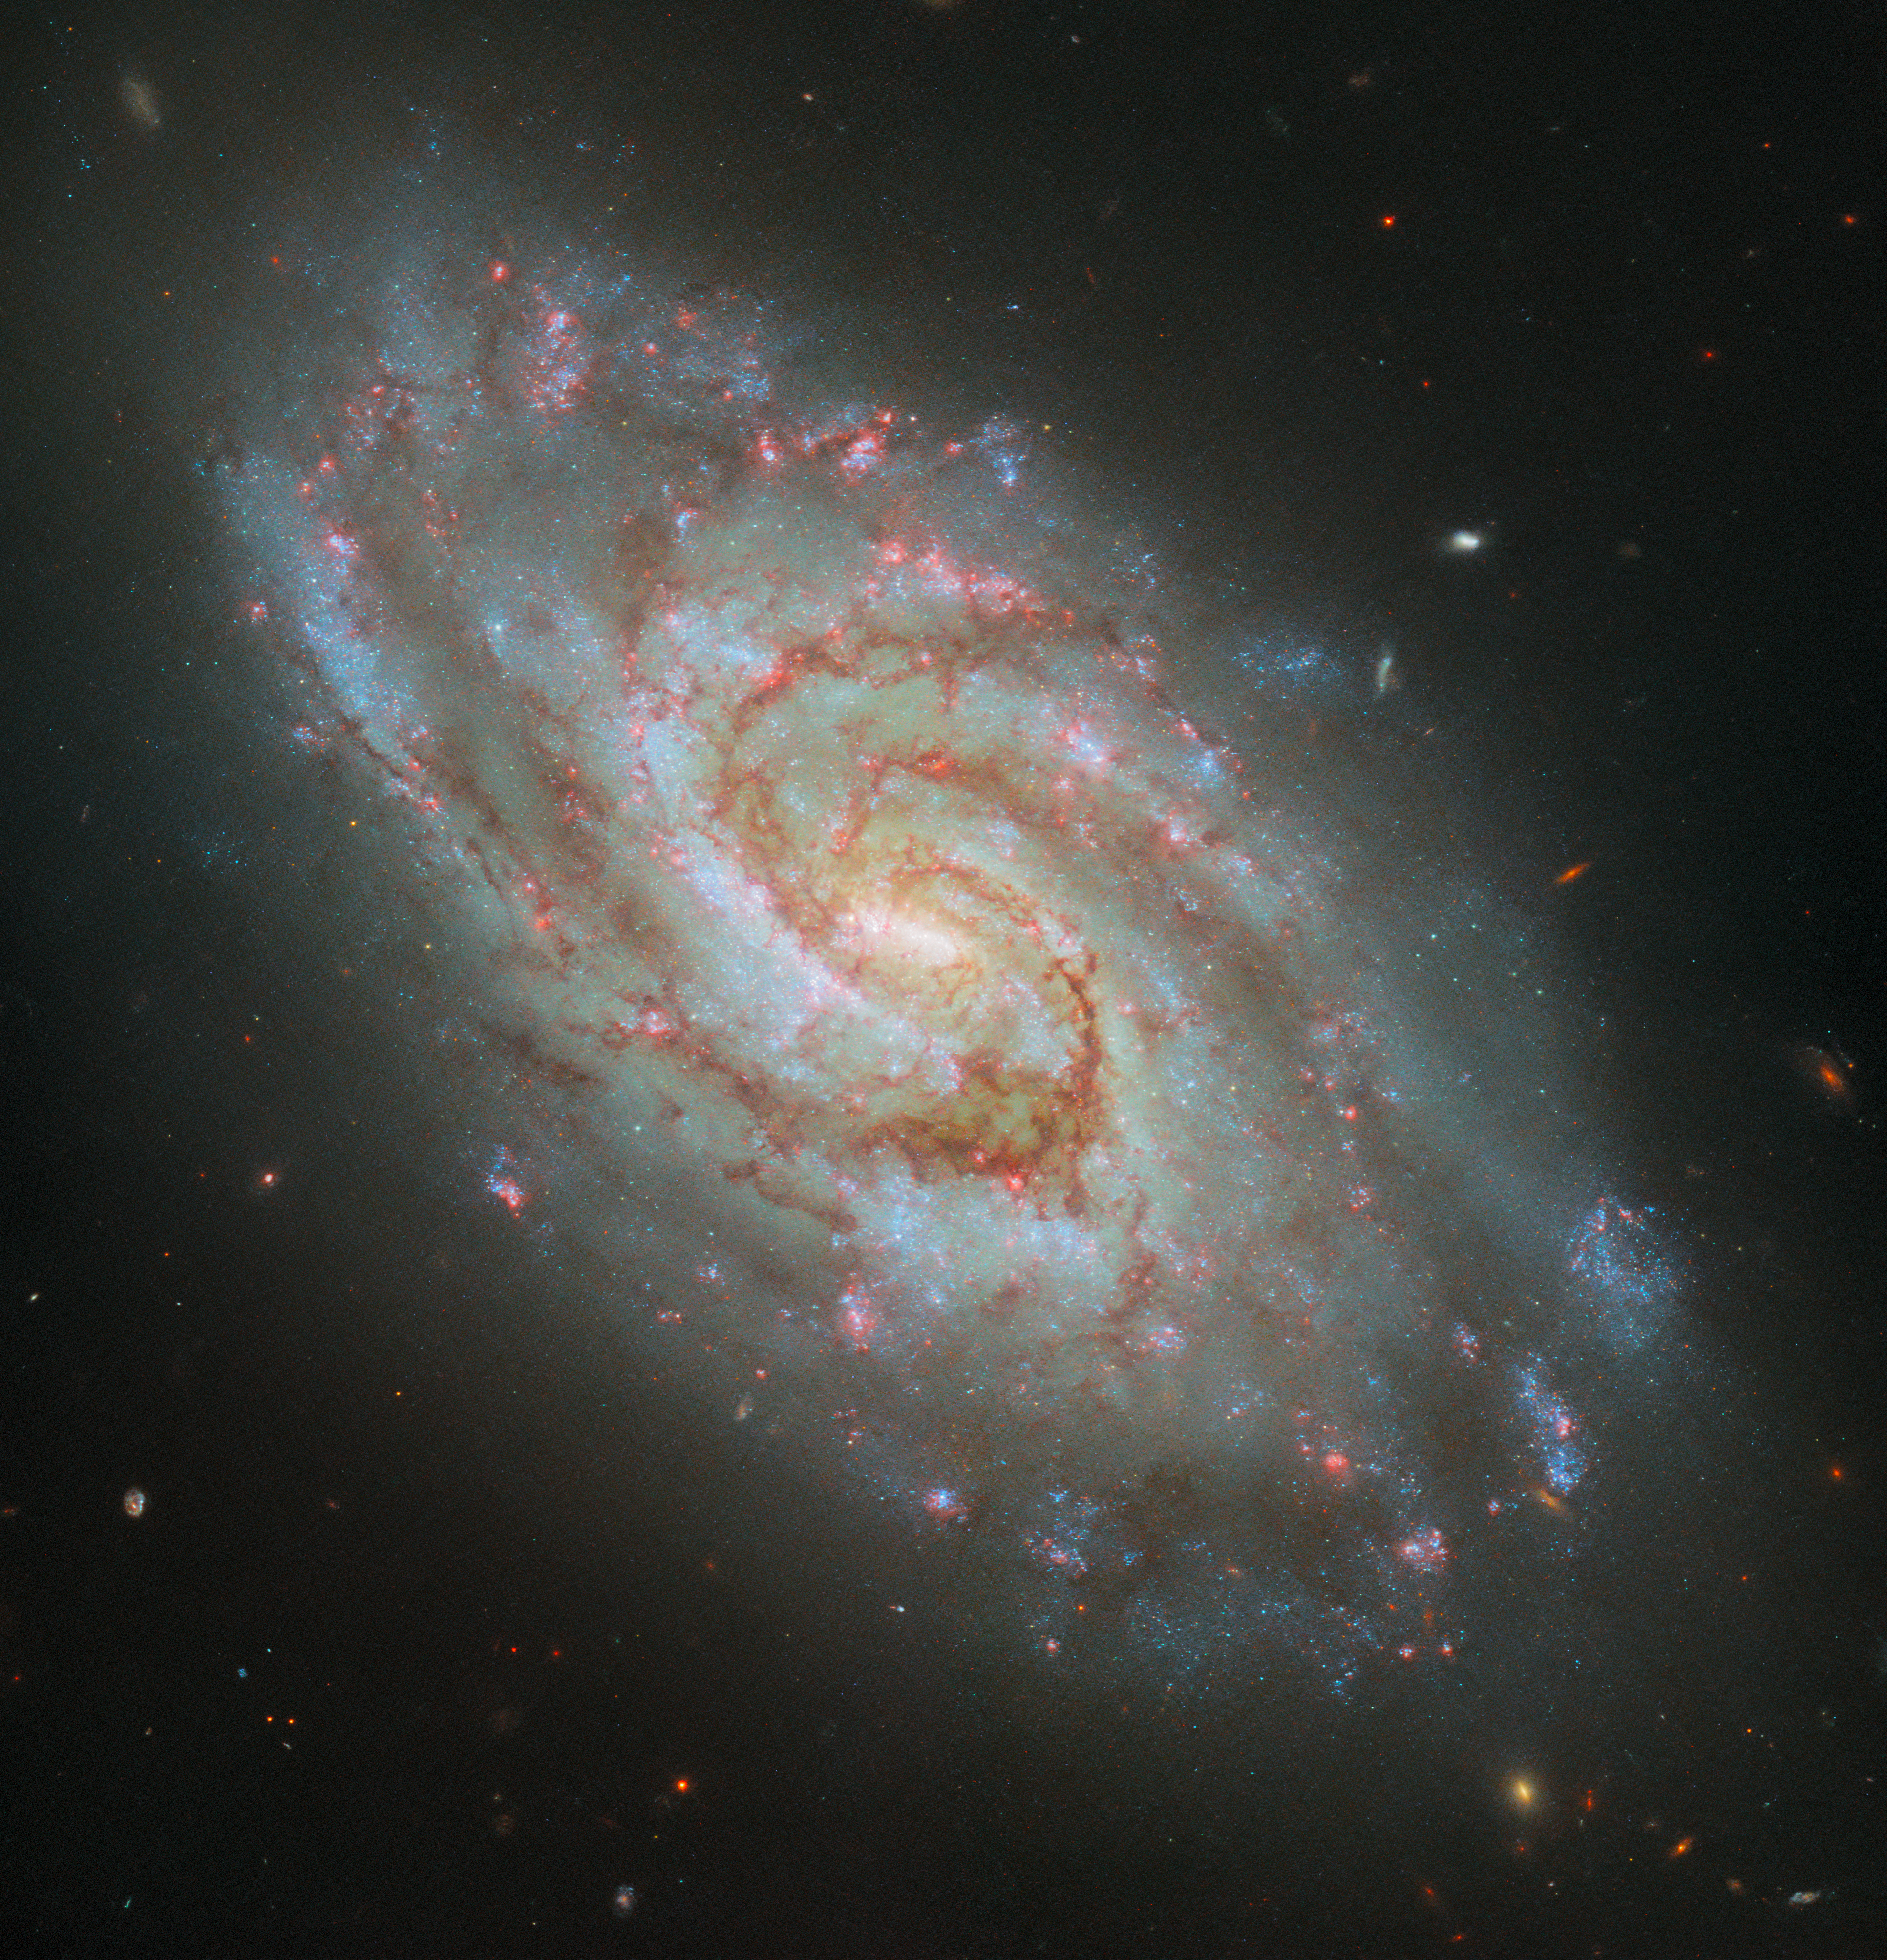

The new and improved IC 1954

The spiral galaxy IC 1954, located 45 million light-years from Earth in the constellation Horologium, is the star of this Picture of the Week from the Hubble Space Telescope. It sports a glowing bar in its core, two main majestically winding spiral arms and clouds of dark dust across it. An image of this galaxy was previously released in 2021; this week’s image is entirely new and now includes H-alpha data. The improved coverage of star-forming nebulae, which are prominent emitters of the red H-alpha light, can be seen in the numerous glowing, pink spots across the disc of the galaxy. Interestingly, some astronomers posit that the galaxy’s ‘bar’ is actually an energetic star-forming region that just happens to lie over the galactic centre.

The new data featured in this image come from a programme to extend the cooperation between multiple observatories: Hubble, the infrared James Webb Space Telescope, and the Atacama Large Millimeter/submillimeter Array, a ground-based radio telescope. By surveying IC 1954 and over fifty other nearby galaxies in radio, infrared, optical, and ultraviolet light, astronomers aim to fully trace and reconstruct the path matter takes through stars and the interstellar gas and dust in each galaxy. Hubble’s observing capabilities form an important part of this survey: it can capture younger stars and star clusters when they are brightest at ultraviolet and optical wavelengths, and its H-alpha filter effectively tracks emission from nebulae. The resulting dataset will form a treasure trove of research on the evolution of stars in galaxies, which Webb will build upon as it continues its science operations into the future.

Credit: ESA/Hubble & NASA, D. Thilker, J. Lee and the PHANGS-HST Team